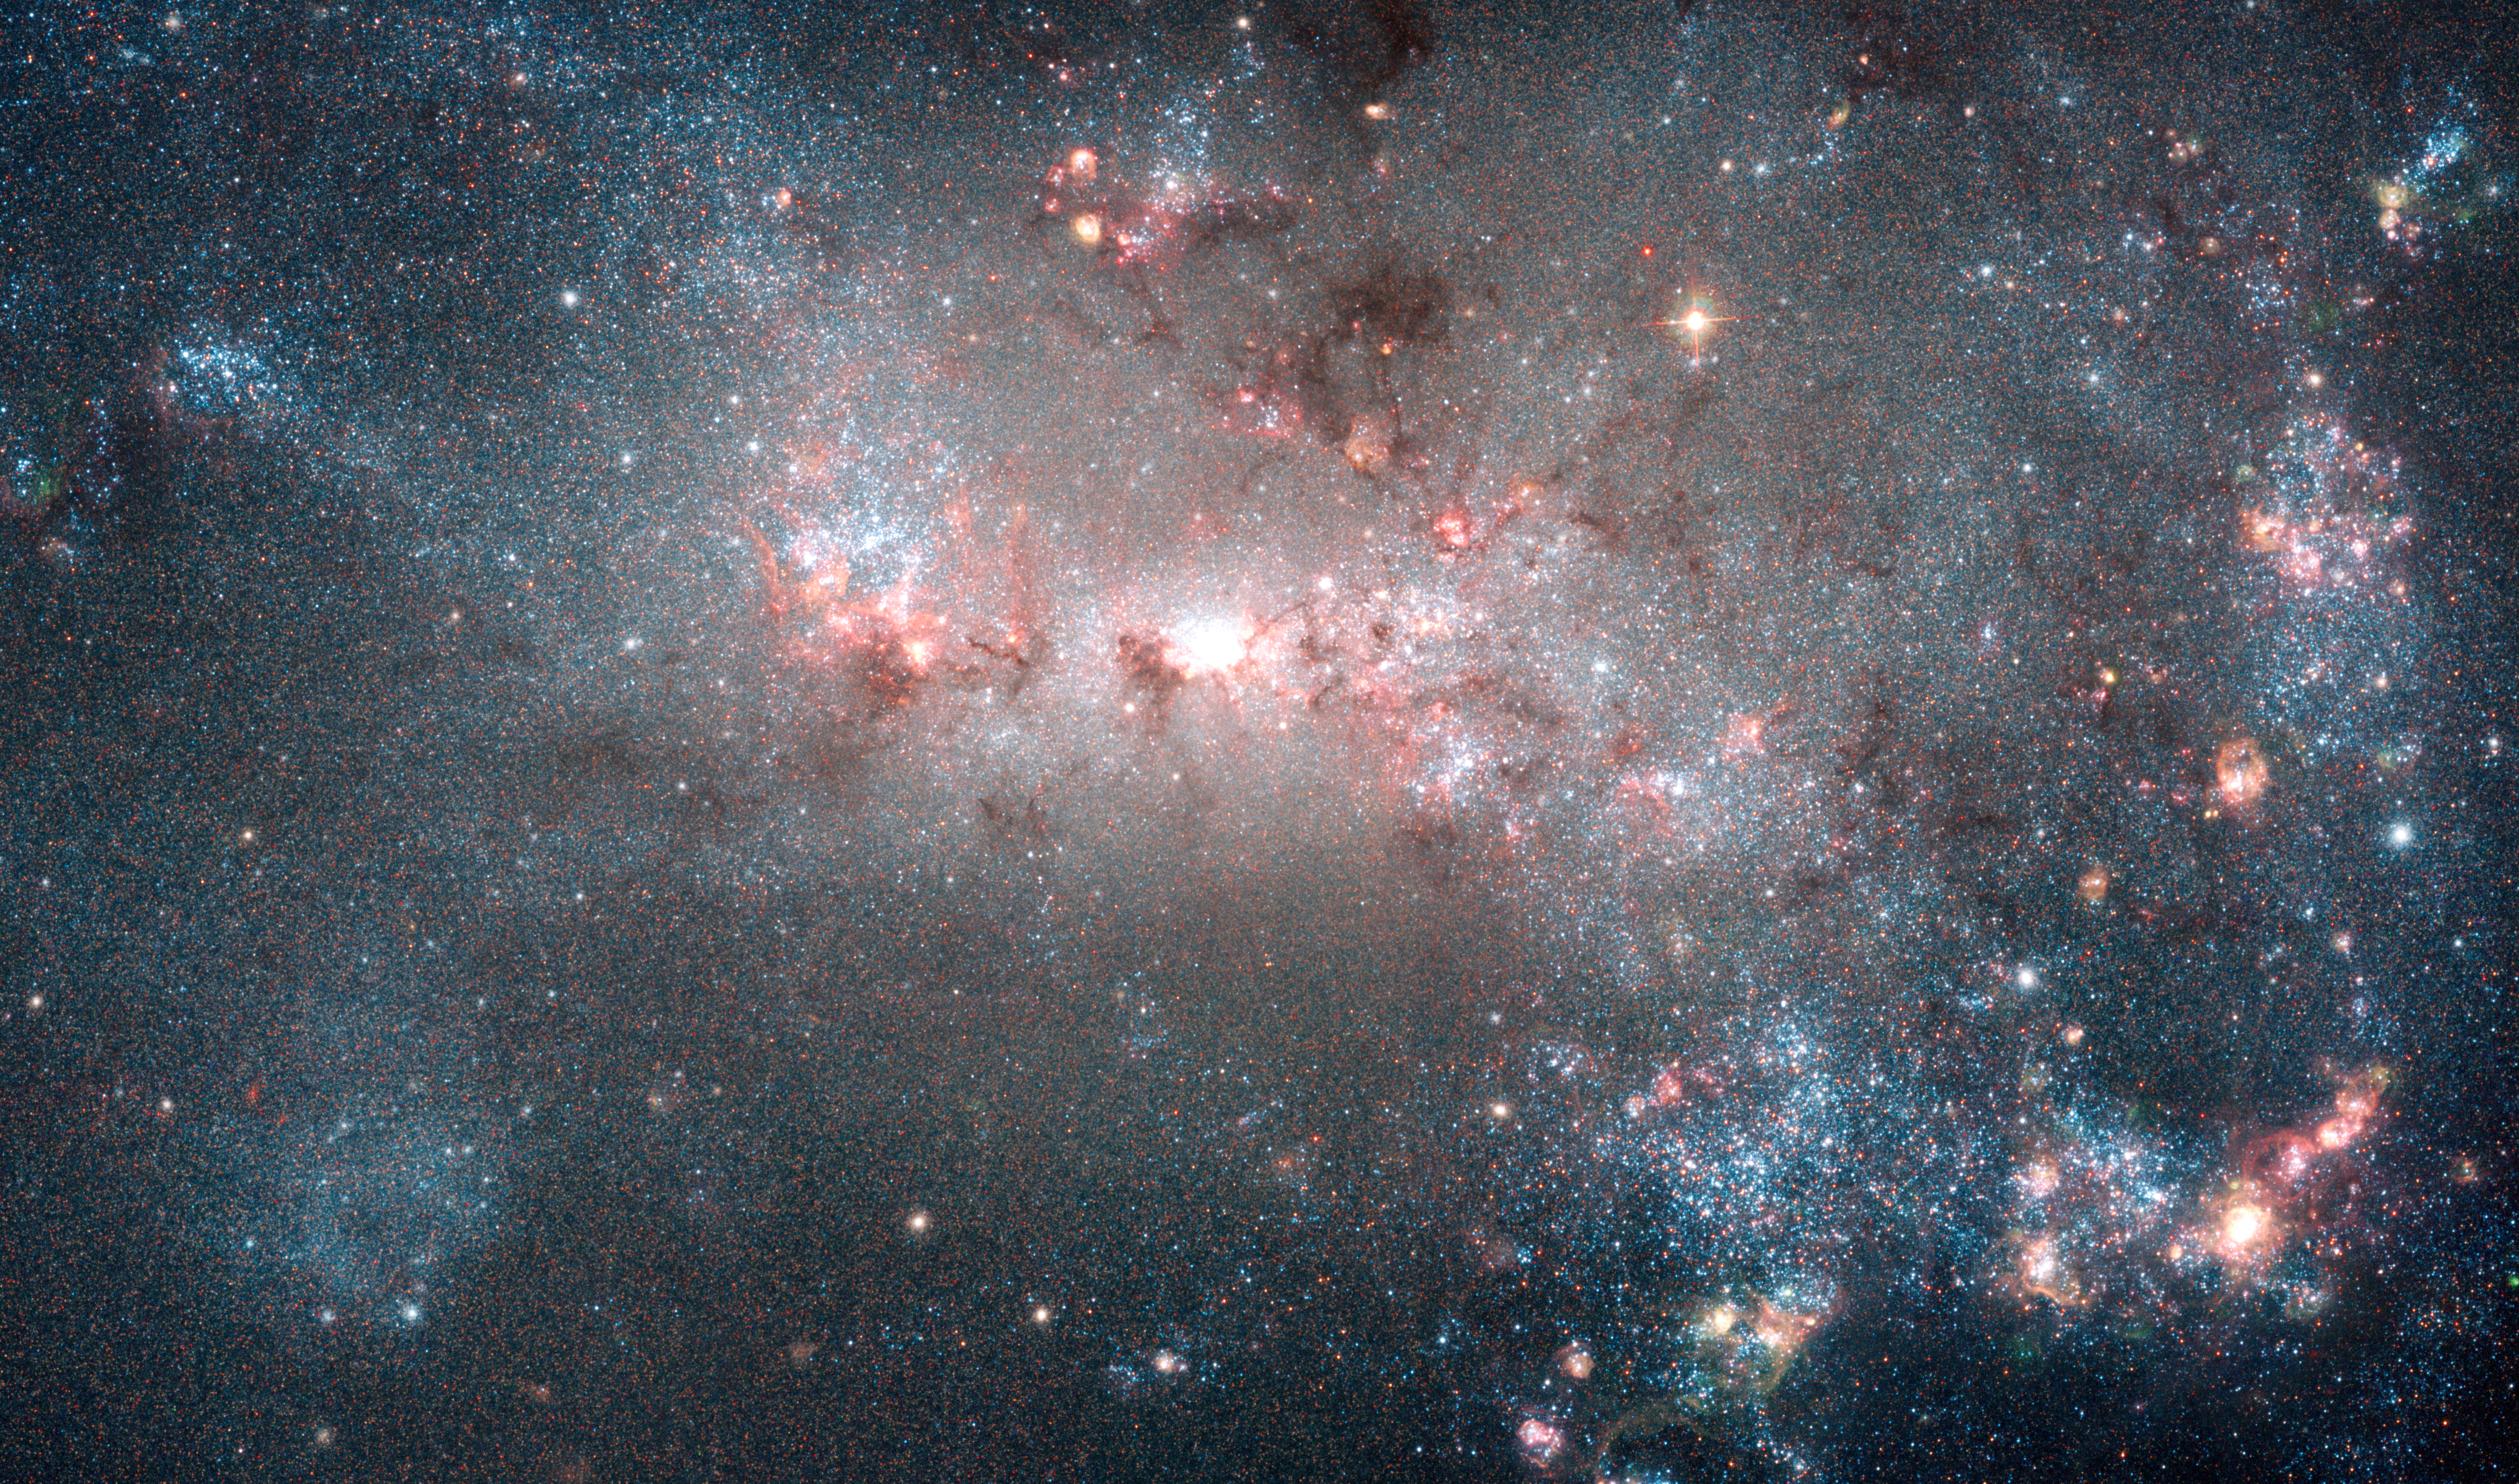

NGC 4449 (Hubble image)

Featured in this 2005 image (released in 2007) from the NASA/ESA Hubble Space Telescope is the dwarf galaxy NGC 4449. This galaxy, also known as Caldwell 21, resides roughly 12.5 million light-years away in the constellation Canes Venatici. It is part of the M94 galaxy group, which lies close to the Local Group that hosts our Milky Way.

NGC 4449 has been forming stars for several billion years, but it is currently experiencing a period of star formation at a much higher rate than in the past. Such unusually explosive and intense star formation activity is called a starburst and for that reason NGC 4449 is known as a starburst galaxy. In fact, at the current rate of star formation, the gas supply that feeds the production of stars would only last for another billion years or so. Starbursts usually occur in the central regions of galaxies, but NGC 4449 displays more widespread star formation activity, and the very youngest stars are observed both in the nucleus and in streams surrounding the galaxy. It's likely that the current widespread starburst was triggered by interaction or merging with a smaller companion; indeed, astronomers think NGC 4449's star formation has been influenced by interactions with several of its neighbours.

Hundreds of thousands of vibrant blue and red stars are visible in this image. Hot bluish-white clusters of massive stars are scattered throughout the galaxy, interspersed with numerous dustier reddish regions of current star formation. Massive dark clouds of gas and dust are silhouetted against the flaming starlight.

Credit: NASA, ESA, A. Aloisi (ESA/STScI) and The Hubble Heritage (STScI/AURA)-ESA/Hubble Collaboration